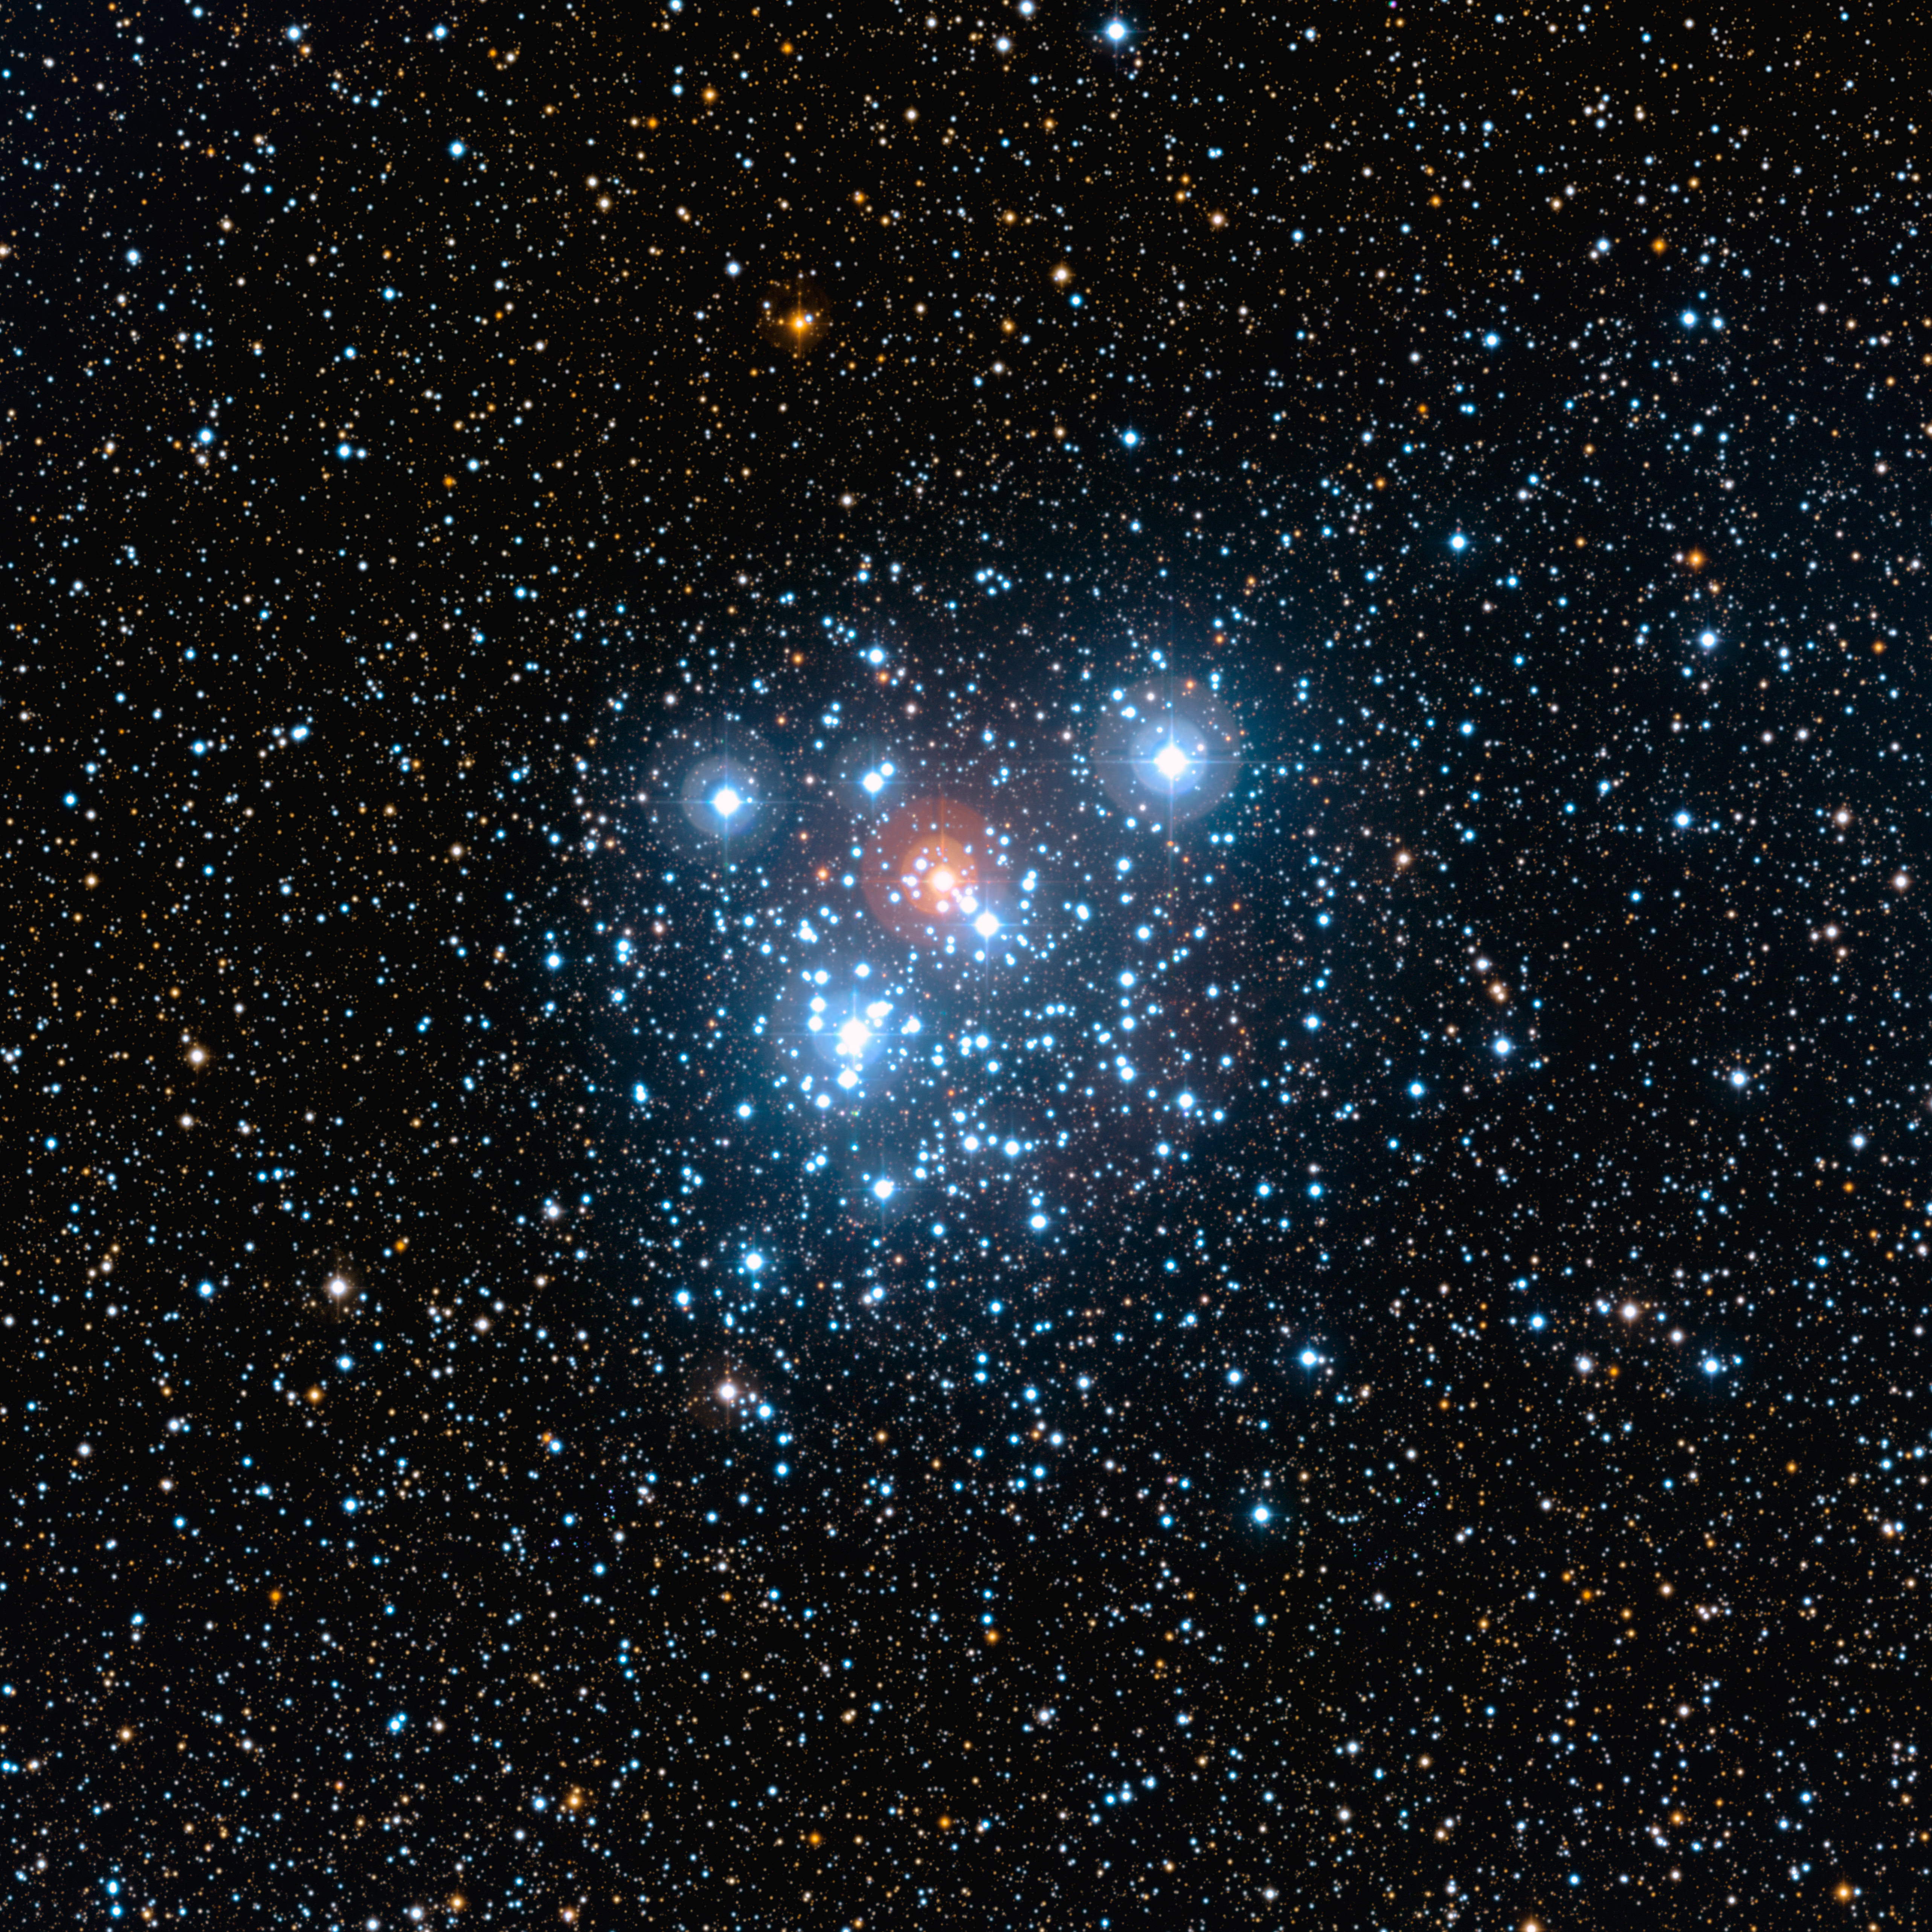

Wide field image of the Jewel Box (ground-based image)

This image of the well-known NGC 4755 cluster or Jewel Box was taken with the Wide Field Imager (WFI) on the MPG/ESO 2.2-metre telescope at ESO's La Silla Observatory. It highlights the cluster and its rich surroundings in all their multicoloured glory. The field of view is 20 arcminutes across. The picture is based on images obtained through B, V and I filters.

Credit: ESO